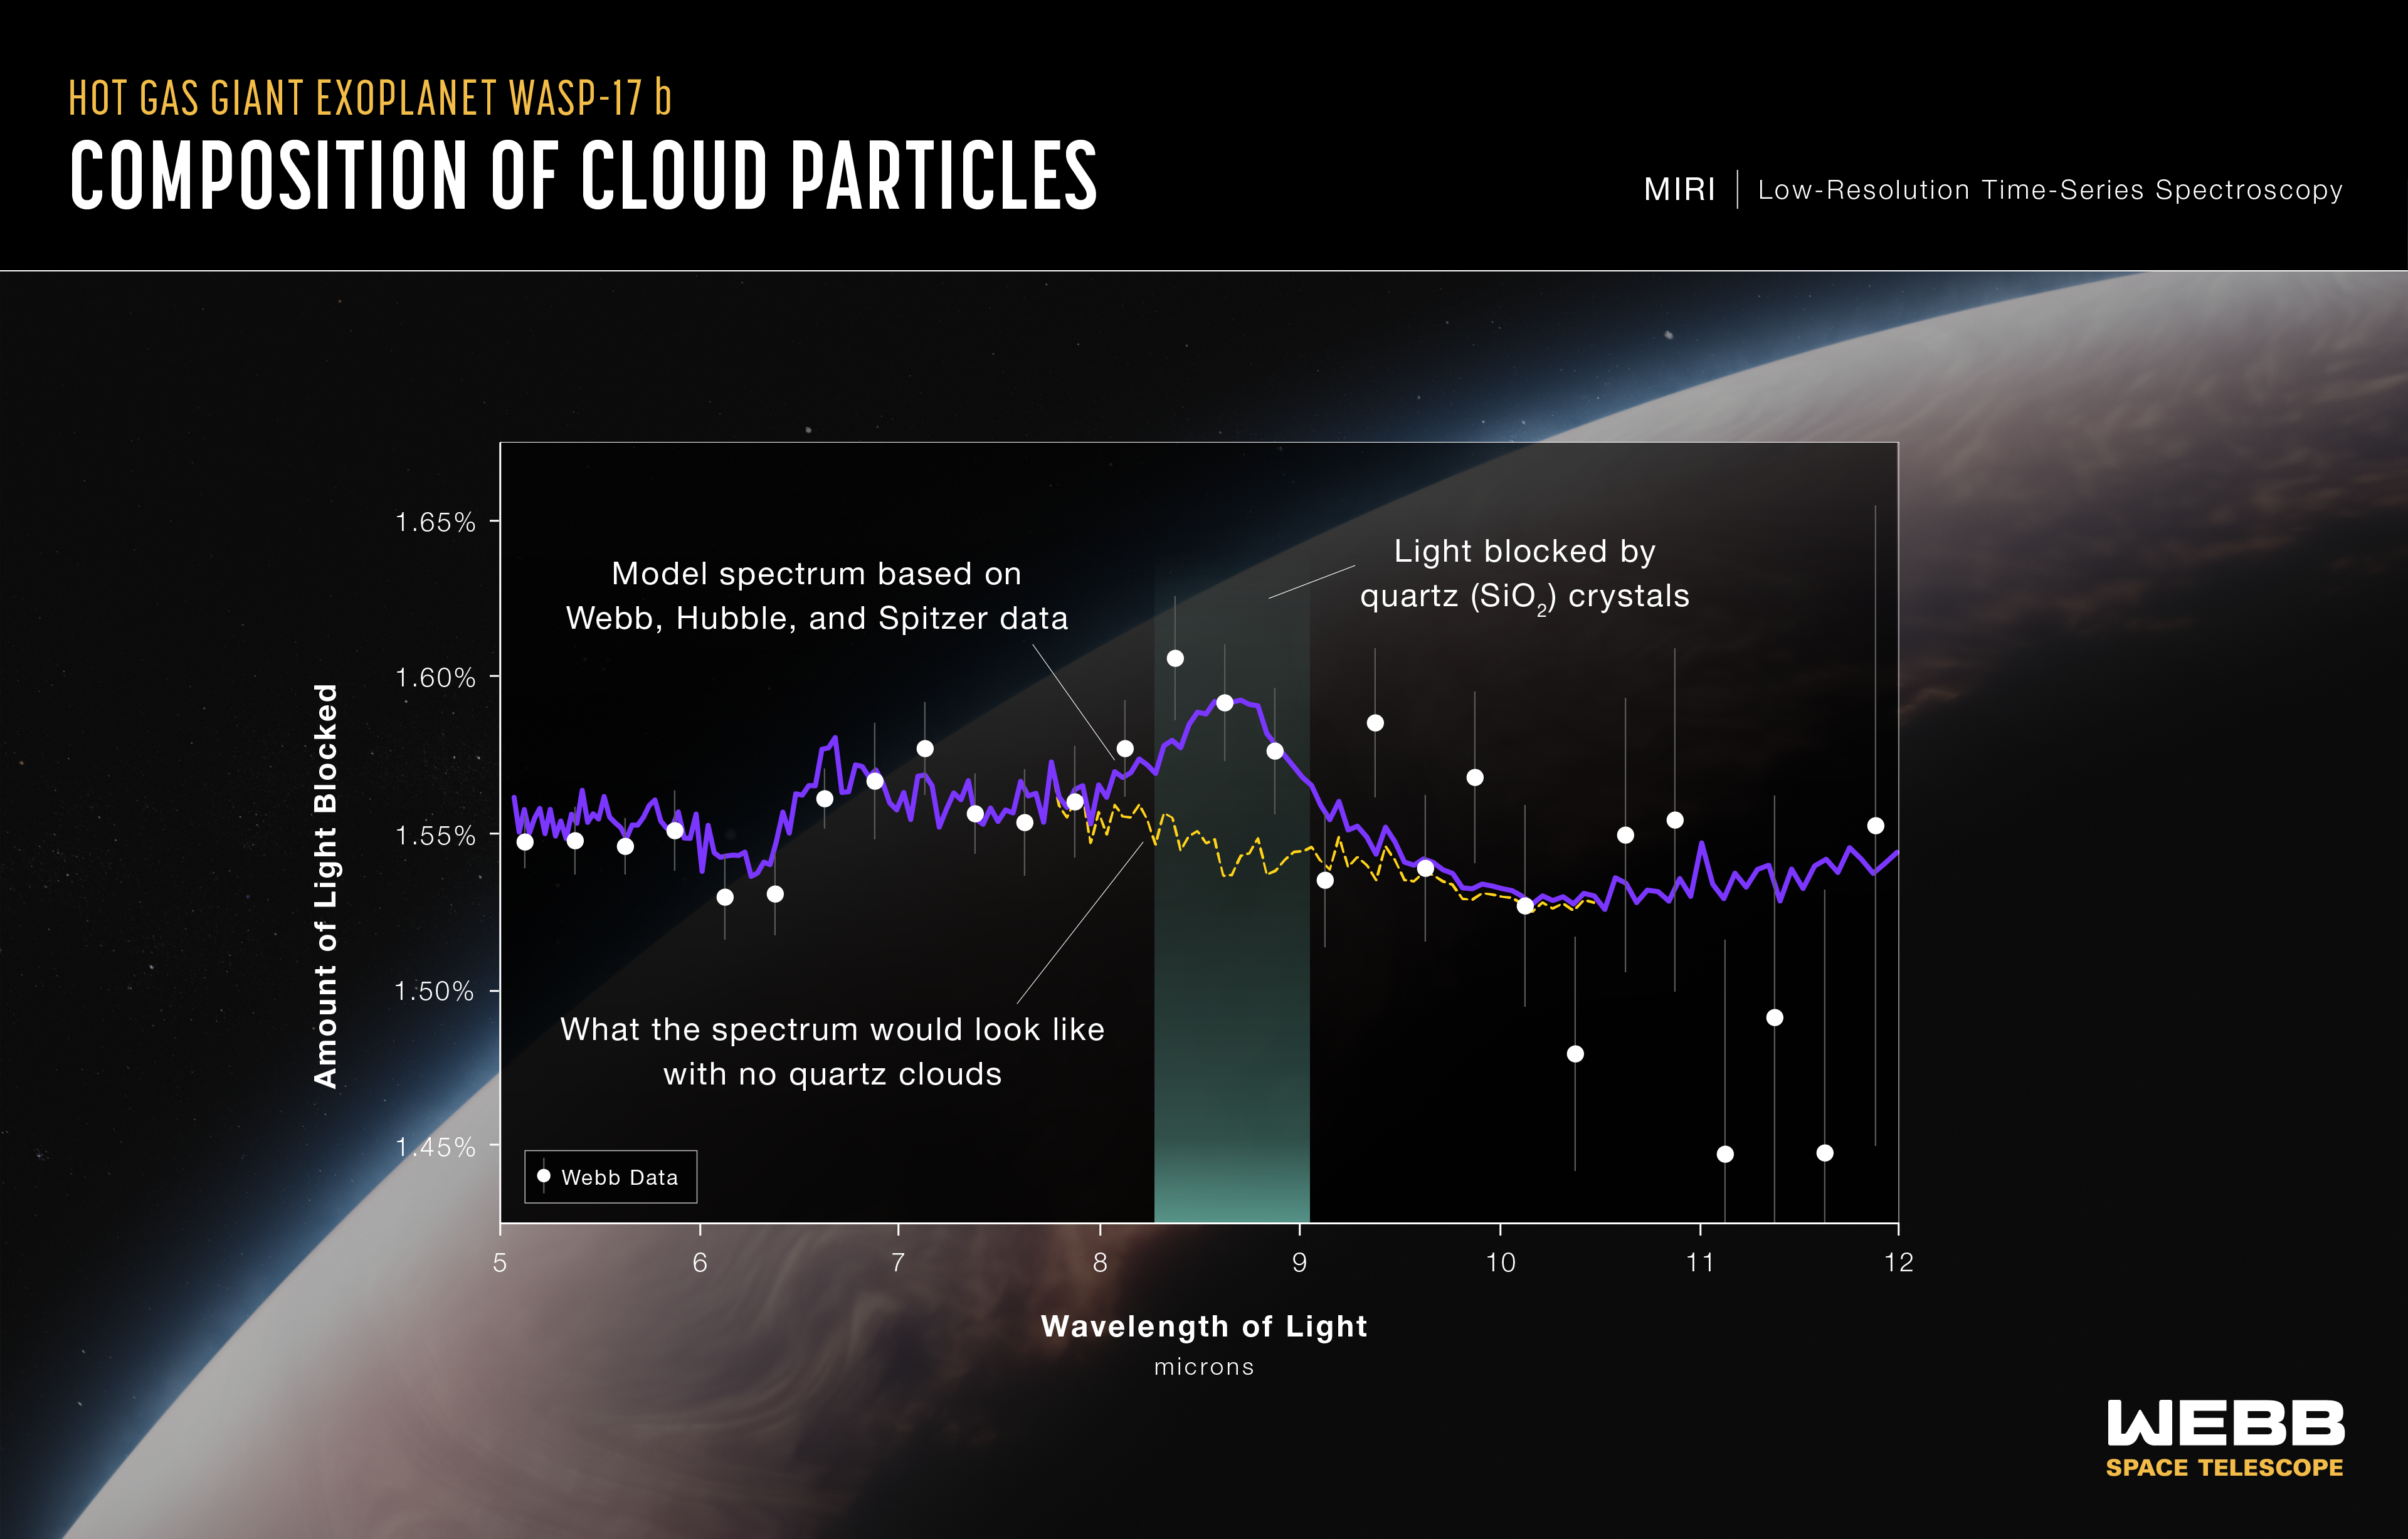

Composition of cloud particles - hot gas giant exoplanet WASP-17b

This is a transmission spectrum of the hot gas giant exoplanet WASP-17 b captured by Webb’s Mid-Infrared Instrument (MIRI) on 12-13 March 2023. It reveals the first evidence for quartz (crystalline silica, SiO2) in the clouds of an exoplanet.

This marks the first time that SiO2 has been identified in an exoplanet, and the first time any specific cloud species has been identified in a transiting exoplanet.

The spectrum was made by measuring the change in brightness of 28 wavelength-bands of mid-infrared light as the planet transited the star. Webb observed the WASP-17 system using MIRI’s low-resolution spectrograph for nearly 10 hours, collecting more than 1,275 measurements before, during, and after the transit.

For each wavelength, the amount of light blocked by the planet’s atmosphere (white circles) was calculated by subtracting the amount that made it through the atmosphere from the amount originally emitted by the star.

The solid purple line is a best-fit model to the Webb (MIRI), Hubble, and Spitzer data (the Hubble and Spitzer data cover wavelengths from 0.34 to 4.5 microns and are not shown on the graph). The spectrum shows a clear feature around 8.6 microns, which astronomers think is caused by silica particles absorbing some of the starlight passing through the atmosphere.

The dashed yellow line shows what that part of the transmission spectrum would look like if the clouds in WASP-17 b’s atmosphere did not contain SiO2.

Credit: NASA, ESA, CSA, R. Crawford (STScI), D. Grant (University of Bristol), H. R. Wakeford (University of Bristol), N. Lewis (Cornell University)